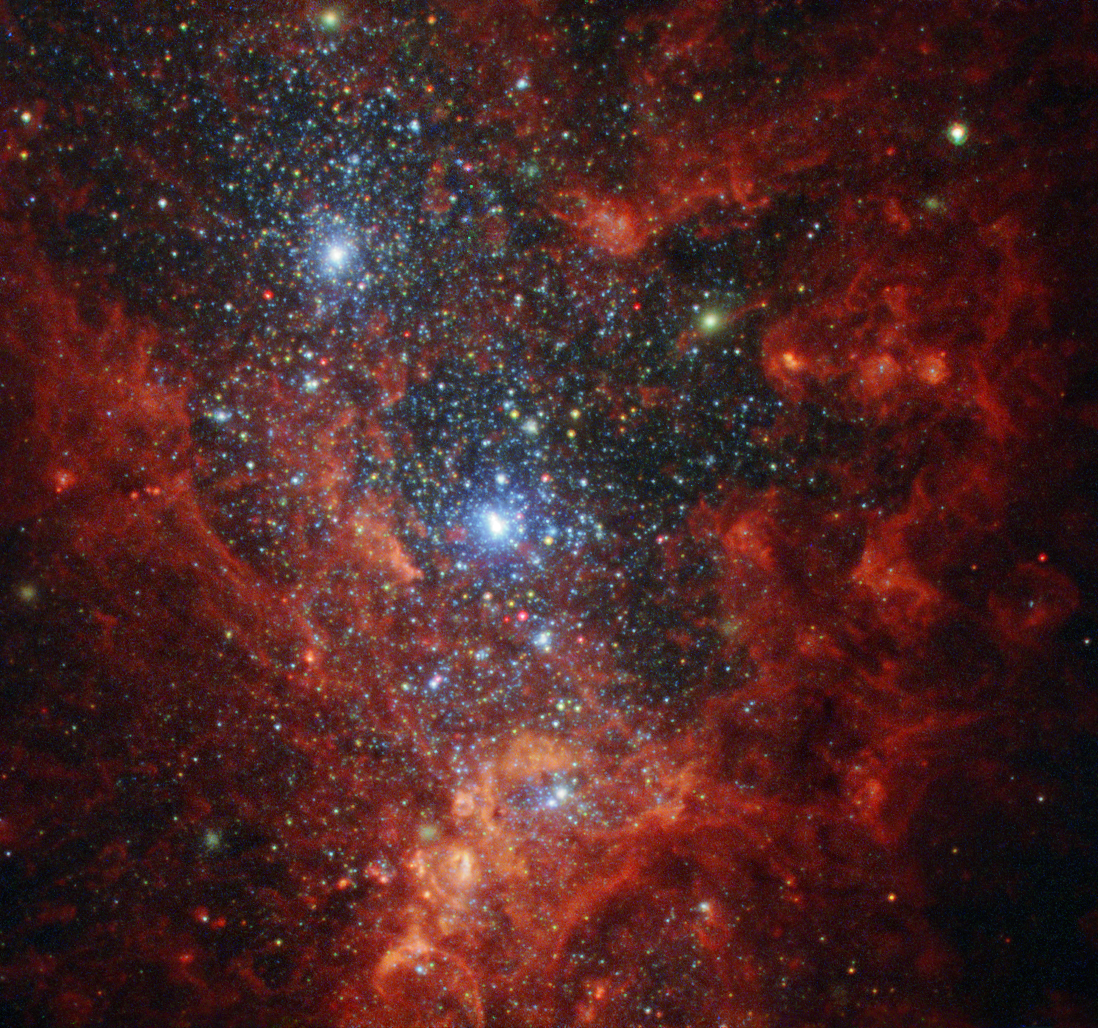

Bursting at the seams

This NASA/ESA Hubble Space Telescope image reveals the iridescent interior of one of the most active galaxies in our local neighbourhood — NGC 1569, a small galaxy located about eleven million light-years away in the constellation of Camelopardalis (The Giraffe).

This galaxy is currently a hotbed of vigorous star formation. NGC 1569 is a starburst galaxy, meaning that — as the name suggests — it is bursting at the seams with stars, and is currently producing them at a rate far higher than that observed in most other galaxies. For almost 100 million years, NGC 1569 has pumped out stars over 100 times faster than the Milky Way!

As a result, this glittering galaxy is home to super star clusters, three of which are visible in this image — one of the two bright clusters is actually the superposition of two massive clusters. Each containing more than a million stars, these brilliant blue clusters reside within a large cavity of gas carved out by multiple supernovae, the energetic remnants of massive stars.

In 2008, Hubble observed the galaxy's cluttered core and sparsely populated outer fringes. By pinpointing individual red giant stars, Hubble’s Advanced Camera for Surveys enabled astronomers to calculate a new — and much more precise — estimate for NGC 1569’s distance. This revealed that the galaxy is actually one and a half times further away than previously thought, and a member of the IC 342 galaxy group.

Astronomers suspect that the IC 342 cosmic congregation is responsible for the star-forming frenzy observed in NGC 1569. Gravitational interactions between this galactic group are believed to be compressing the gas within NGC 1569. As it is compressed, the gas collapses, heats up and forms new stars.

Credit: ESA/Hubble & NASA, Aloisi, Ford Acknowledgement: Judy Schmidt (Geckzilla)